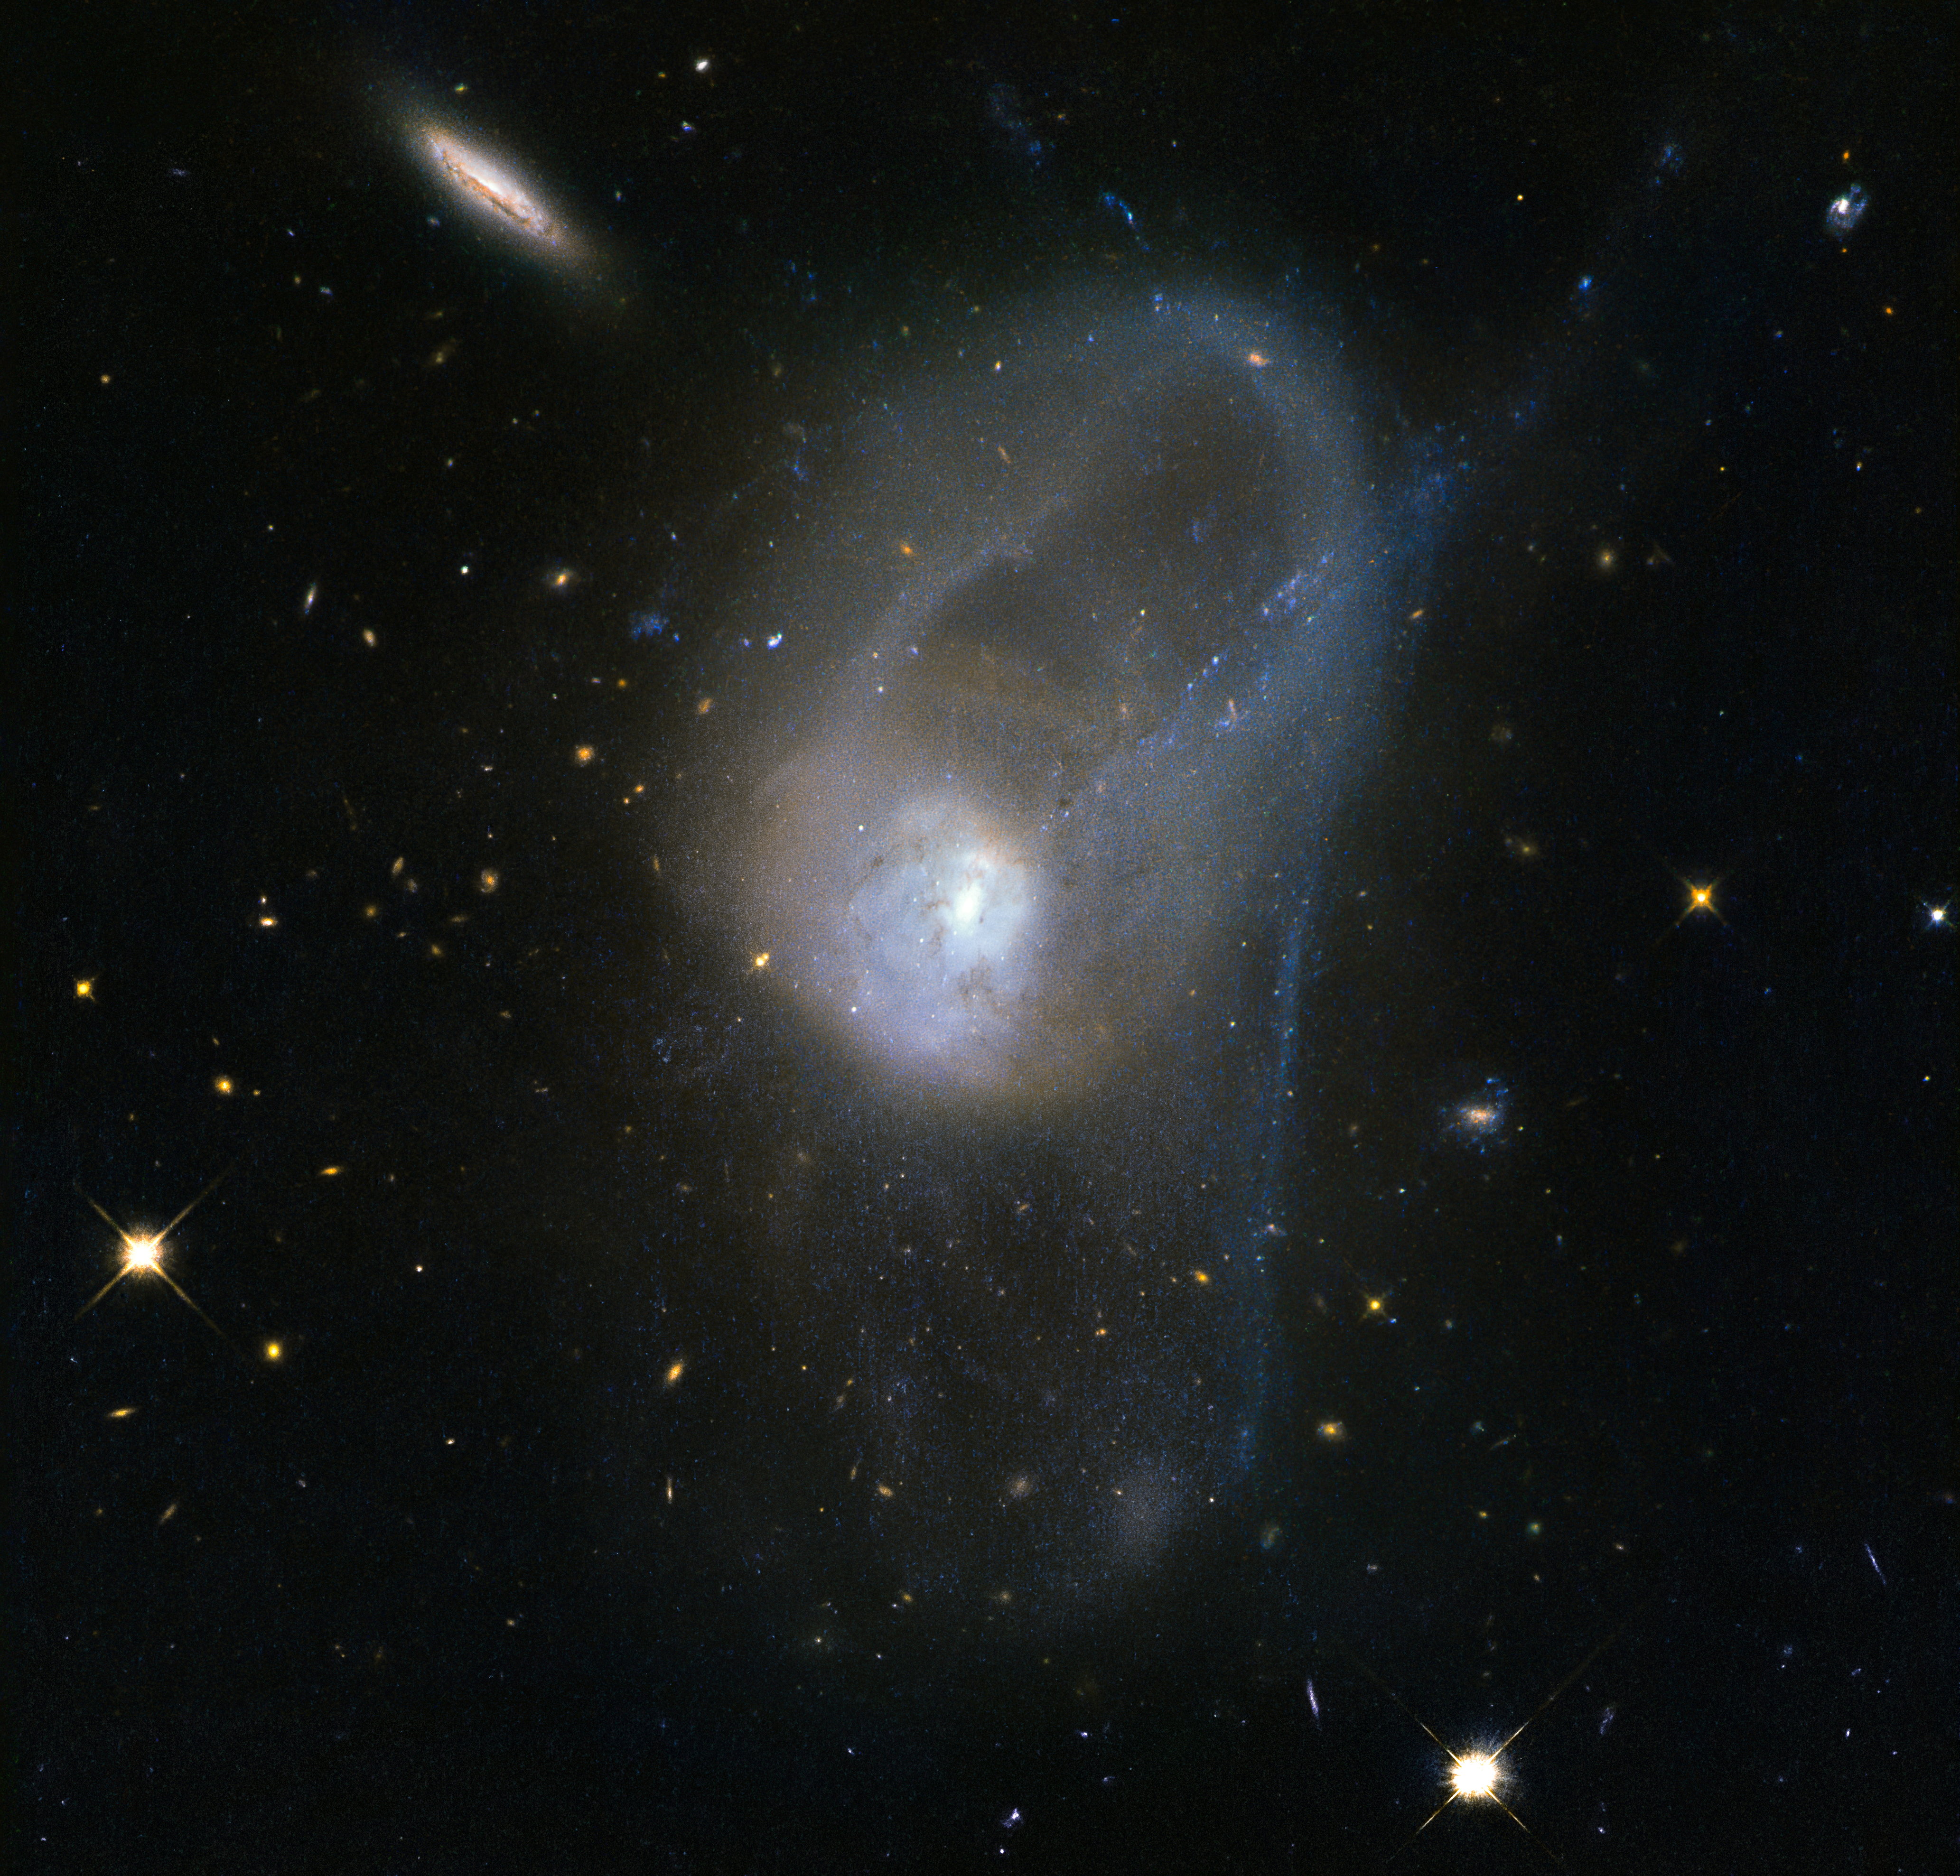

Evolution in slow motion

It is known today that merging galaxies play a large role in the evolution of galaxies and the formation of elliptical galaxies in particular. However there are only a few merging systems close enough to be observed in depth. The pair of interacting galaxies picture seen here — known as NGC 3921 — is one of these systems.

NGC 3921 — found in the constellation of Ursa Major (The Great Bear) — is an interacting pair of disc galaxies in the late stages of its merger. Observations show that both of the galaxies involved were about the same mass and collided about 700 million years ago. You can see clearly in this image the disturbed morphology, tails and loops characteristic of a post-merger.

The clash of galaxies caused a rush of star formation and previous Hubble observations showed over 1000 bright, young star clusters bursting to life at the heart of the galaxy pair.

Credit: ESA/Hubble & NASA
Acknowledgement: Judy Schmidt (geckzilla.com)